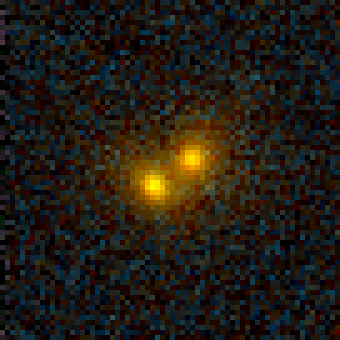

Galaxy Cluster MS 1054-03

Exciting Hubble Space Telescope images of more than a dozen very distant colliding galaxies indicate that, at least in some cases, big massive galaxies form through collisions between smaller ones, in a 'generation after generation' never-ending story.

Credit: Pieter van Dokkum, Marijn Franx (University of Groningen/Leiden), ESA and NASA